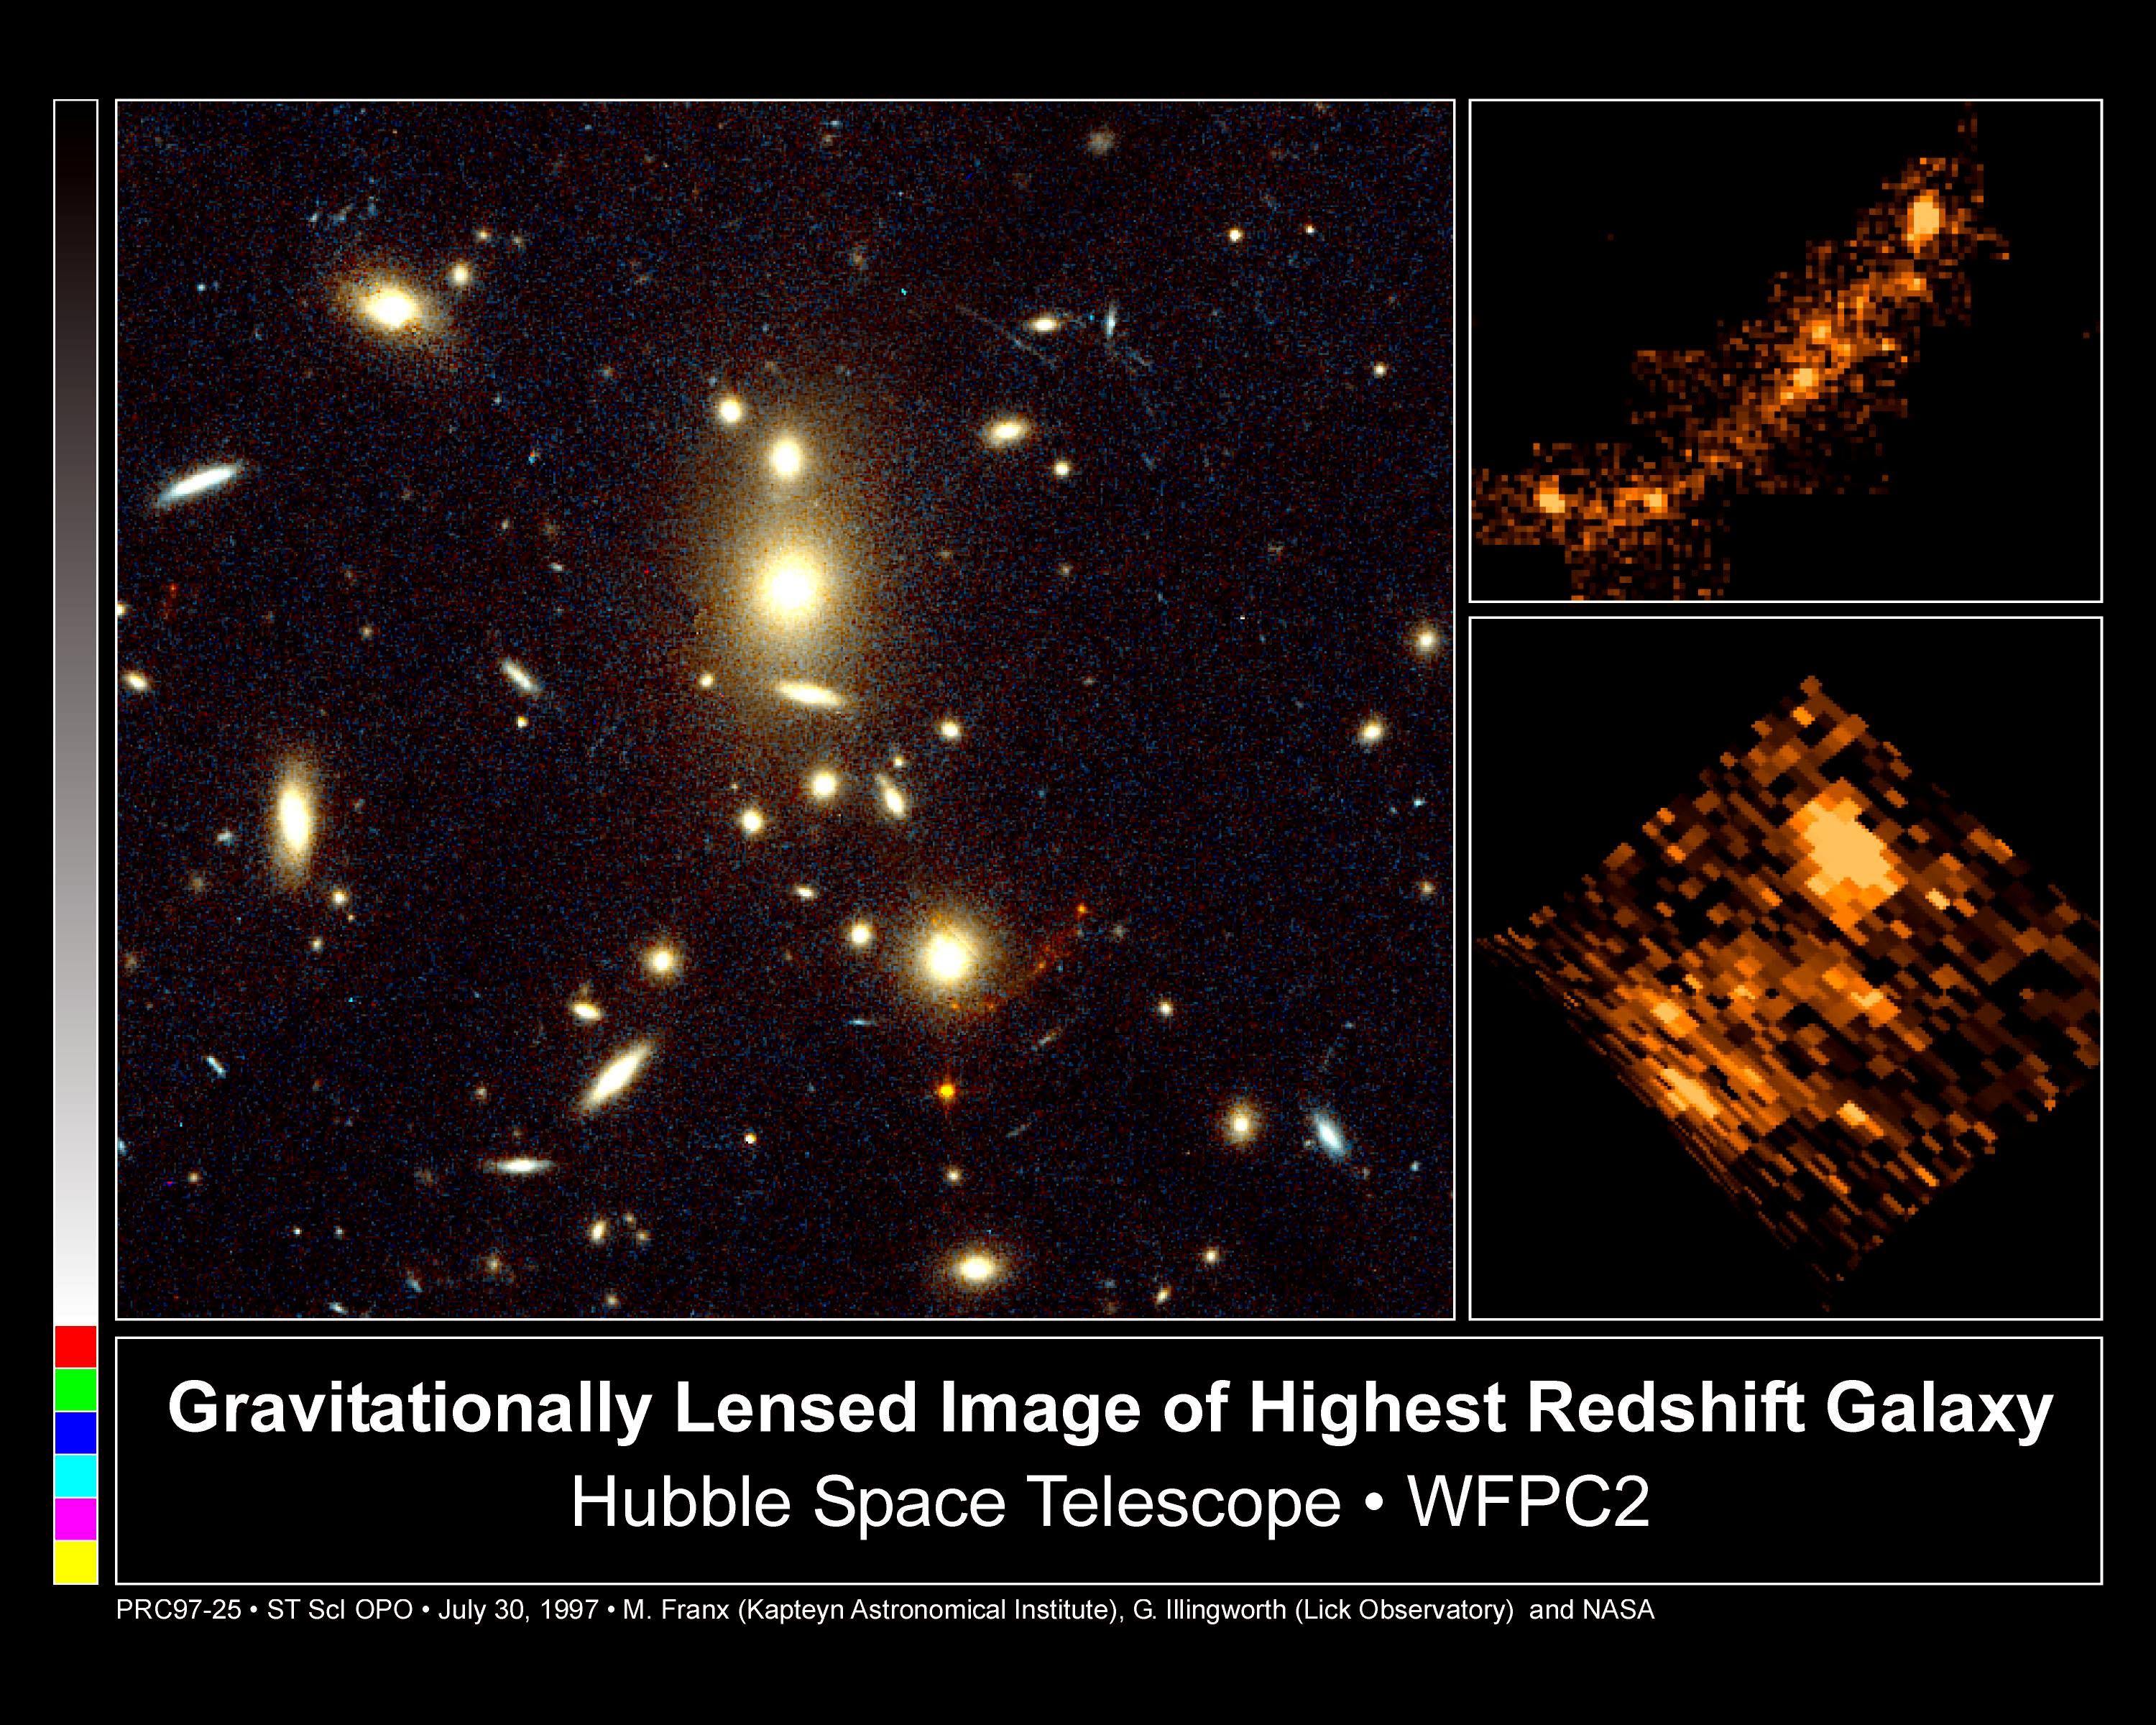

Gravitationally Lensed Image of Highest Redshift Galaxy

This NASA/ESA Hubble Space Telescope image of the galaxy cluster CL1358+62 has uncovered a gravitationally-lensed image of a more distant galaxy located far beyond the cluster.

Credit: Marijn Franx (University of Groningen, The Netherlands), Garth Illingworth (University of California, Santa Cruz), and NASA/ESA